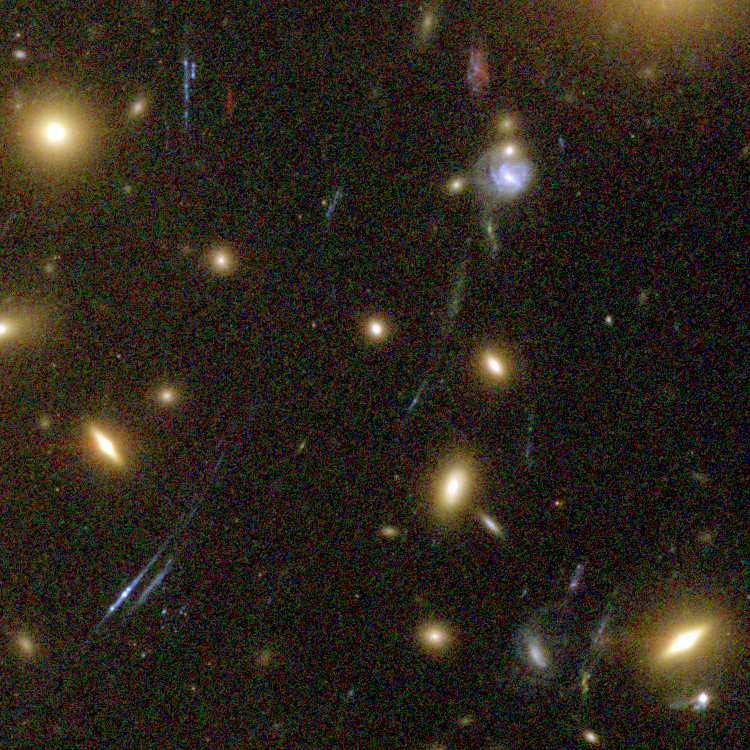

Galaxy Cluster Abell 1689 Details

The Advanced Camera for Surveys (ACS) aboard NASA's Hubble Space Telescope has here used a natural "zoom lens" in space to peer straight through the center of one of the most massive galaxy clusters known, called Abell 1689. Some of the faintest objects in this picture are probably more than 13 billion light-years away.

Credit: NASA, N. Benitez (JHU), T. Broadhurst (The Hebrew University), H. Ford (JHU), M. Clampin(STScI), G. Hartig (STScI), G. Illingworth (UCO/Lick Observatory), the ACS Science Team and ESA